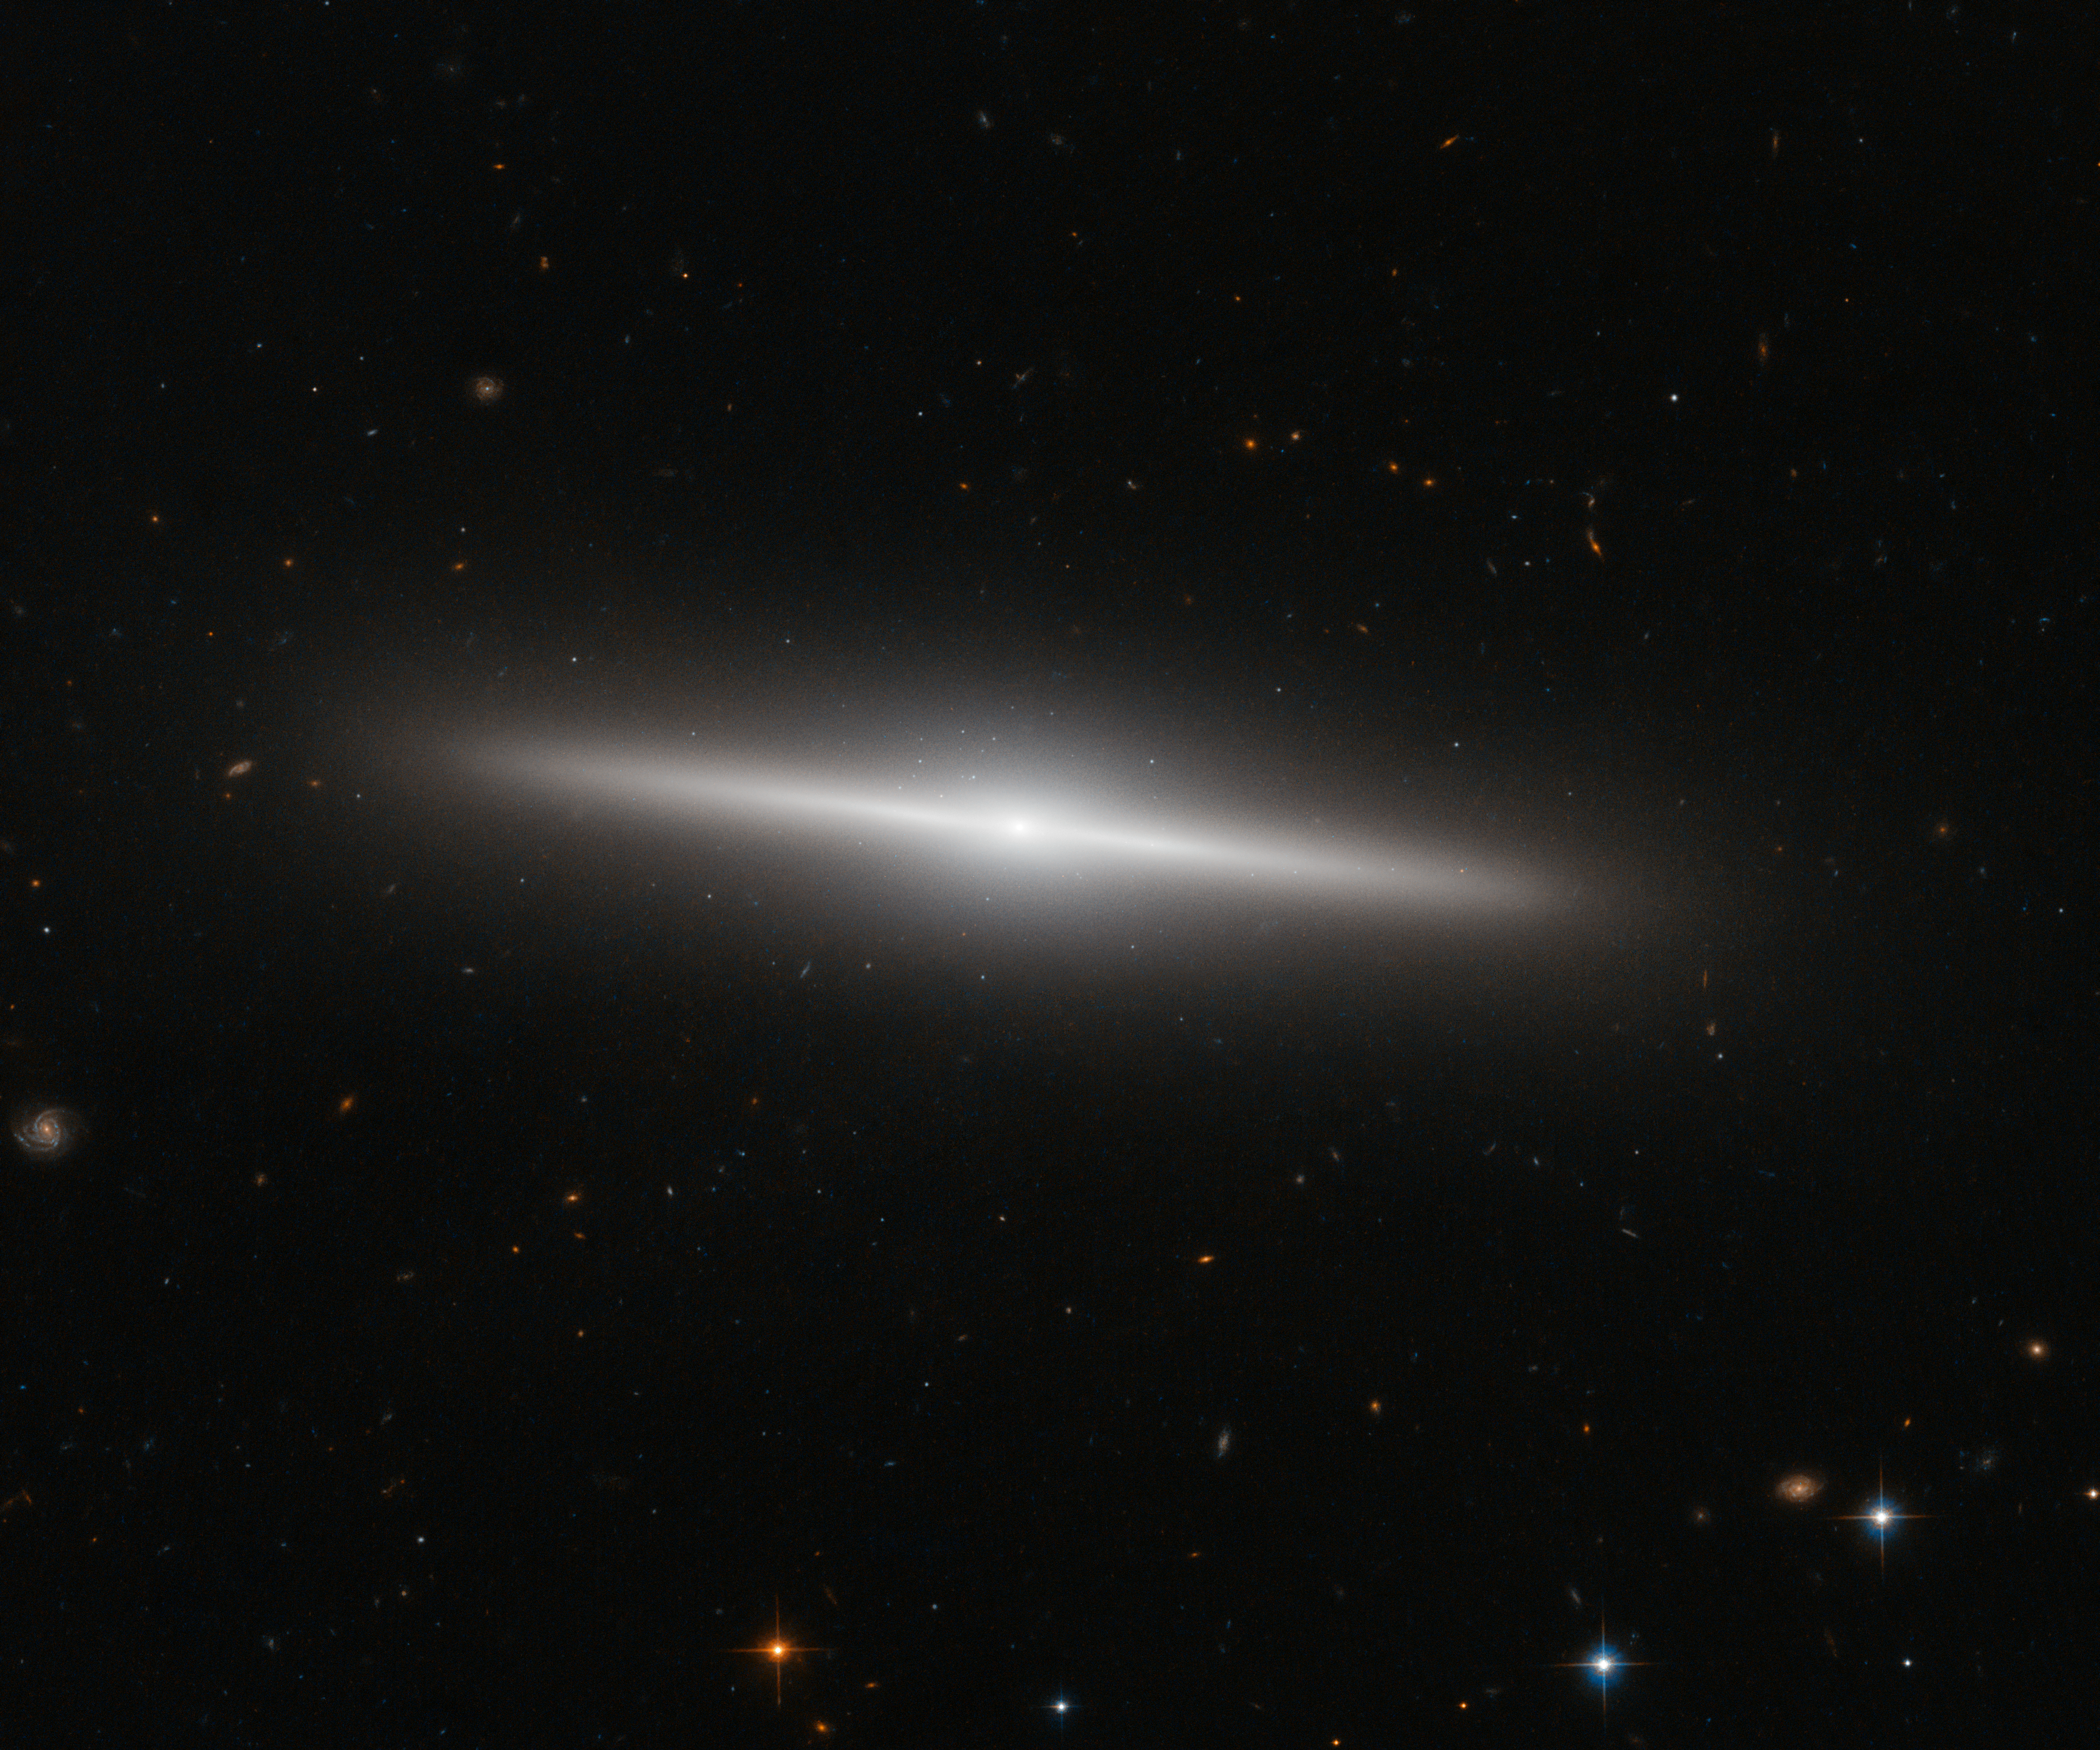

The beautiful side of IC 335

This new NASA/ESA Hubble Space Telescope image shows the galaxy IC 335 in front of a backdrop of distant galaxies. IC 335 is part of a galaxy group containing three other galaxies, and located in the Fornax Galaxy Cluster 60 million light-years away.

As seen in this image, the disc of IC 335 appears edge-on from the vantage point of Earth. This makes it harder for astronomers to classify it, as most of the characteristics of a galaxy’s morphology — the arms of a spiral or the bar across the centre — are only visible on its face. Still, the 45 000 light-year-long galaxy could be classified as an S0 type.

These lenticular galaxies are an intermediate state in galaxy morphological classification schemes between true spiral and elliptical galaxies. They have a thin stellar disc and a bulge, like spiral galaxies, but in contrast to typical spiral galaxies they have used up most of the interstellar medium. Only a few new stars can be created out of the material that is left and the star formation rate is very low. Hence, the population of stars in S0 galaxies consists mainly of aging stars, very similar to the star population in elliptical galaxies.

As S0 galaxies have only ill-defined spiral arms they are easily mistaken for elliptical galaxies if they are seen inclined face-on or edge-on as IC 335 here. And indeed, despite the morphological differences between S0 and elliptical class galaxies, they share a some common characteristics, like typical sizes and spectral features.

Both classes are also early-type galaxies, as they are evolving passively. However, elliptical galaxies may be passively evolving when we observe them, but they had violent interactions with other galaxies in their past. Whereas S0 galaxies are either aging and fading spiral galaxies, which never had any interactions with other galaxies, or they are the aging result of a single merger between two spiral galaxies in the past. The exact nature of these galaxies is still a matter of debate.

Credit: ESA/Hubble & NASA